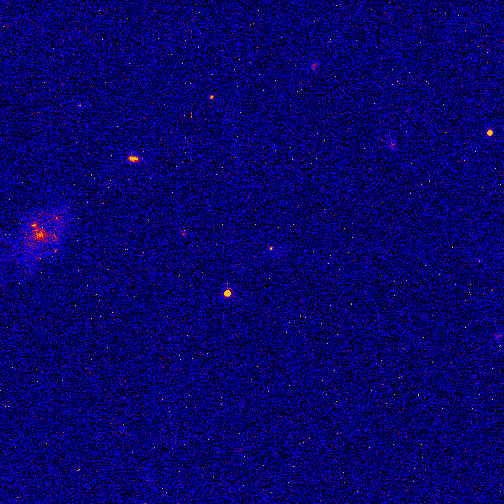

Hubble tracks the fading optical counterpart of a gamma ray burst

The refurbished Hubble Space Telescope has made an important contribution toward solving one of astronomy's greatest enigmas by allowing astronomers to continue watching the fading visible-light counterpart of a gamma-ray burst (GRB), one of the most energetic and mysterious events in the universe.

The so-called optical counterpart is presumably a cooling fireball from the catastrophic event that triggered the massive burst of invisible gamma rays -- the highest-energy radiation in the universe. This event may have unleashed as much energy in a few seconds as the Sun does in ten billion years!

Credit: The Space Telescope Science Institute is operated by the Associationof Universities for Research in Astronomy, Inc. (AURA), for NASA, undercontract with the Goddard Space Flight Center, Greenbelt, MD. The Hubble Space Telescope is a project of internationalcooperation between NASA and the European Space Agency (ESA)